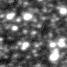

Lone black hole passes in front of star (ground-based view)

Two images of a crowded starfield as seen through a ground-based telescope show the subtle brightening of a star due to the effect of gravitational microlensing, where an invisible but massive foreground object passes in front of the star and amplifies its light.

Credit: NOAO, Cerro Tololo Inter-American Observatory